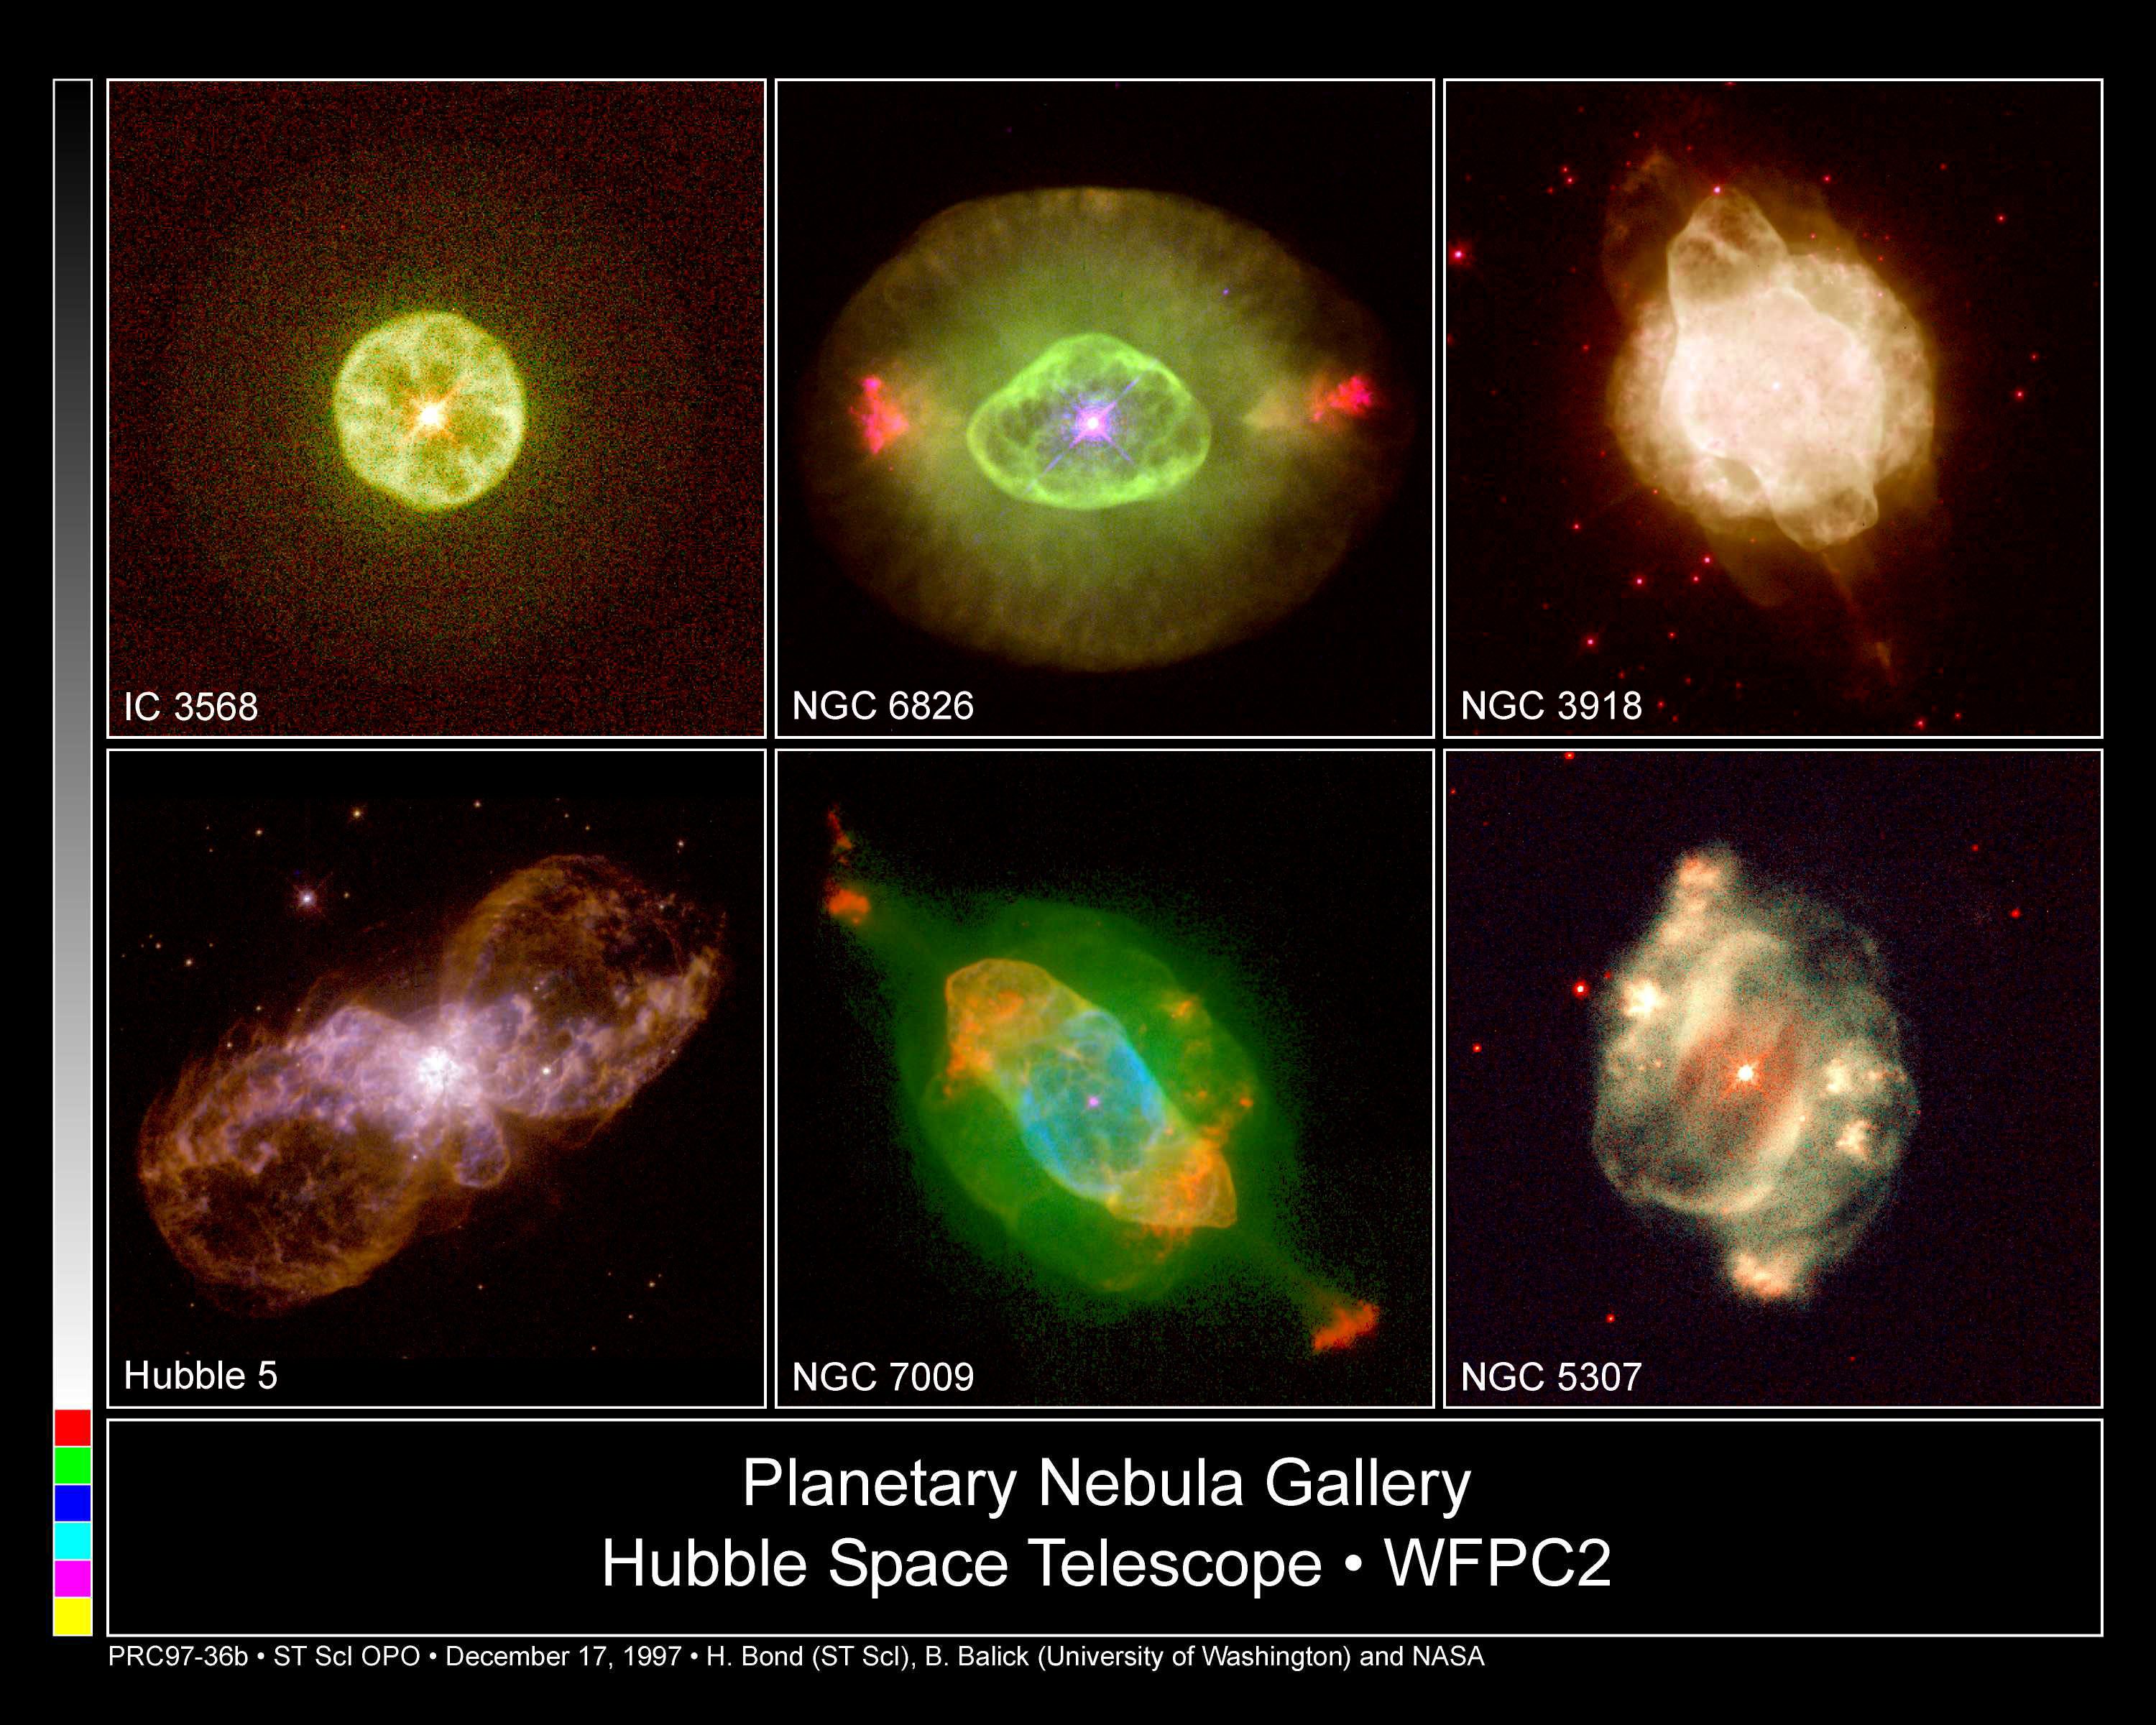

Hubble's Planetary Nebula Gallery

A small gallery of various planetary nebulae taken by the Hubble Space Telescope by various PI's.

Credit: H. Bond (ST ScI), B. Balick (University of Washington) and NASA/ESA